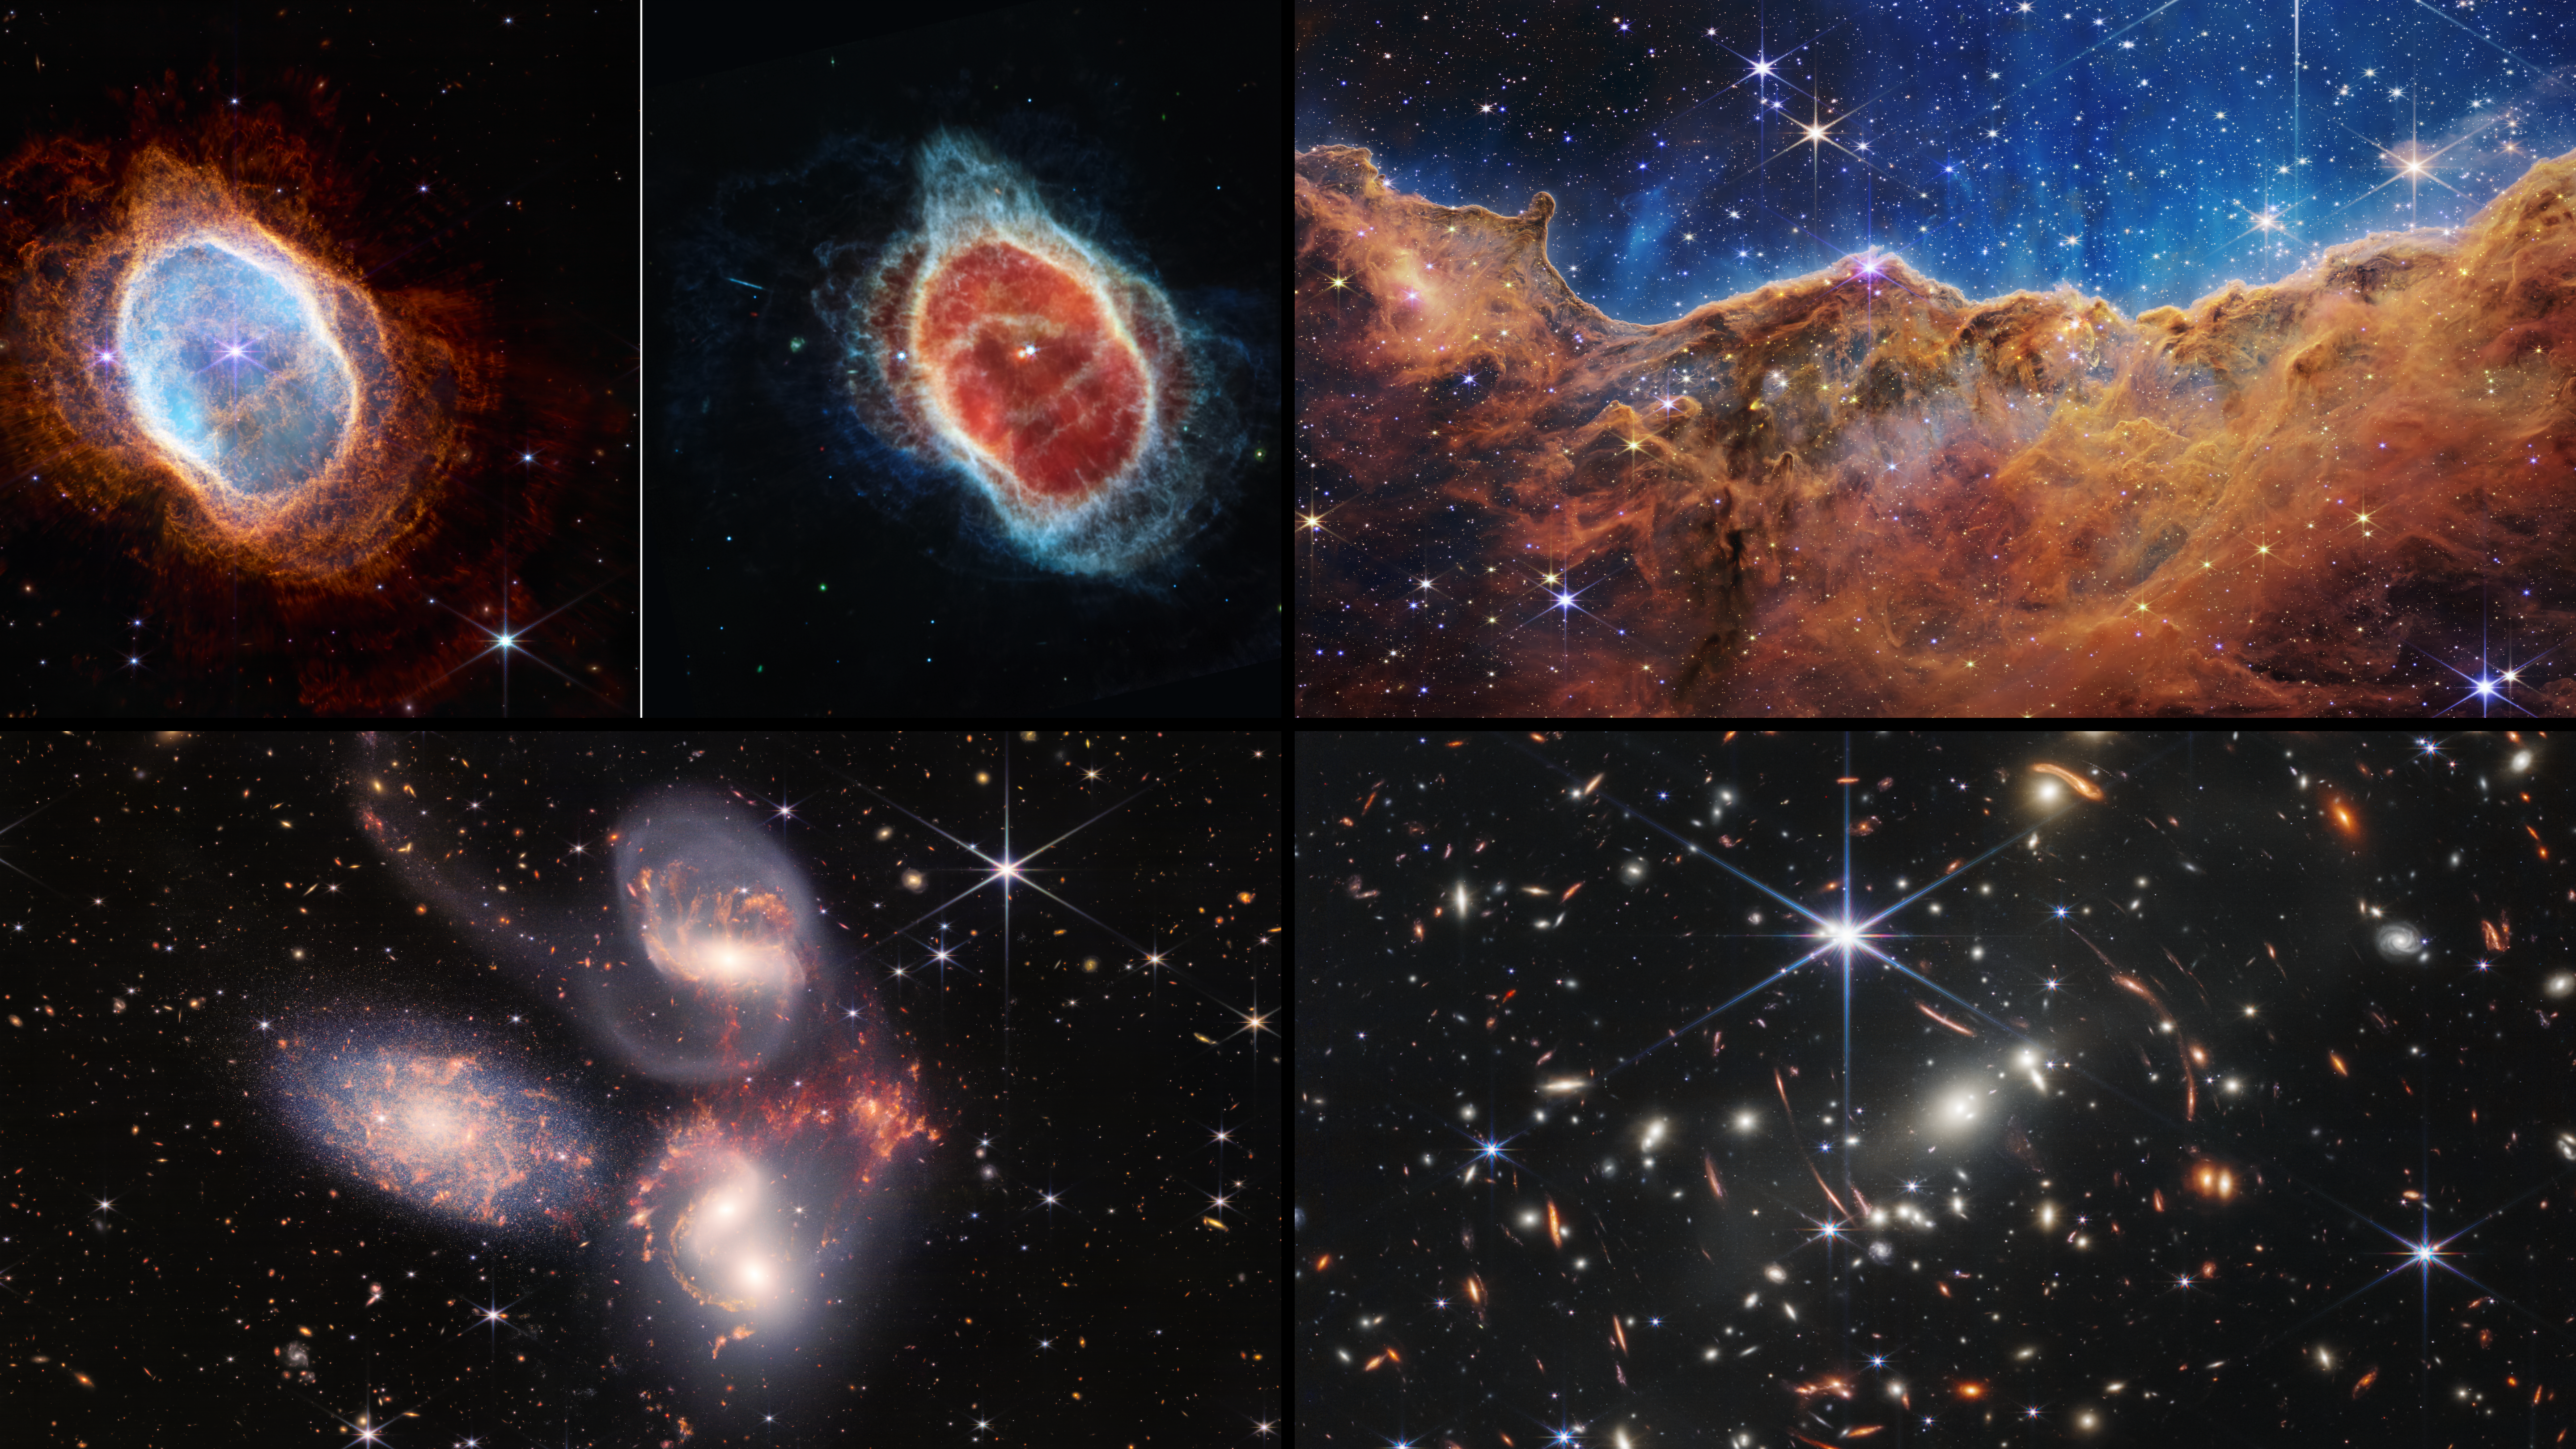

Webb’s First Images

The dawn of a new era in astronomy has begun as the world gets its first look at the full capabilities of the NASA/ESA/CSA James Webb Space Telescope. The telescope’s first full-colour images and spectroscopic data, which uncover a spectacular collection of cosmic features that have remained elusive until now, were released on 12 July 2022.

For a full array of Webb’s first images and spectra, including downloadable files, please visit: https://esawebb.org/initiatives/webbs-first-images/

Credit: NASA, ESA, CSA, STScI, and the Webb ERO Production Team